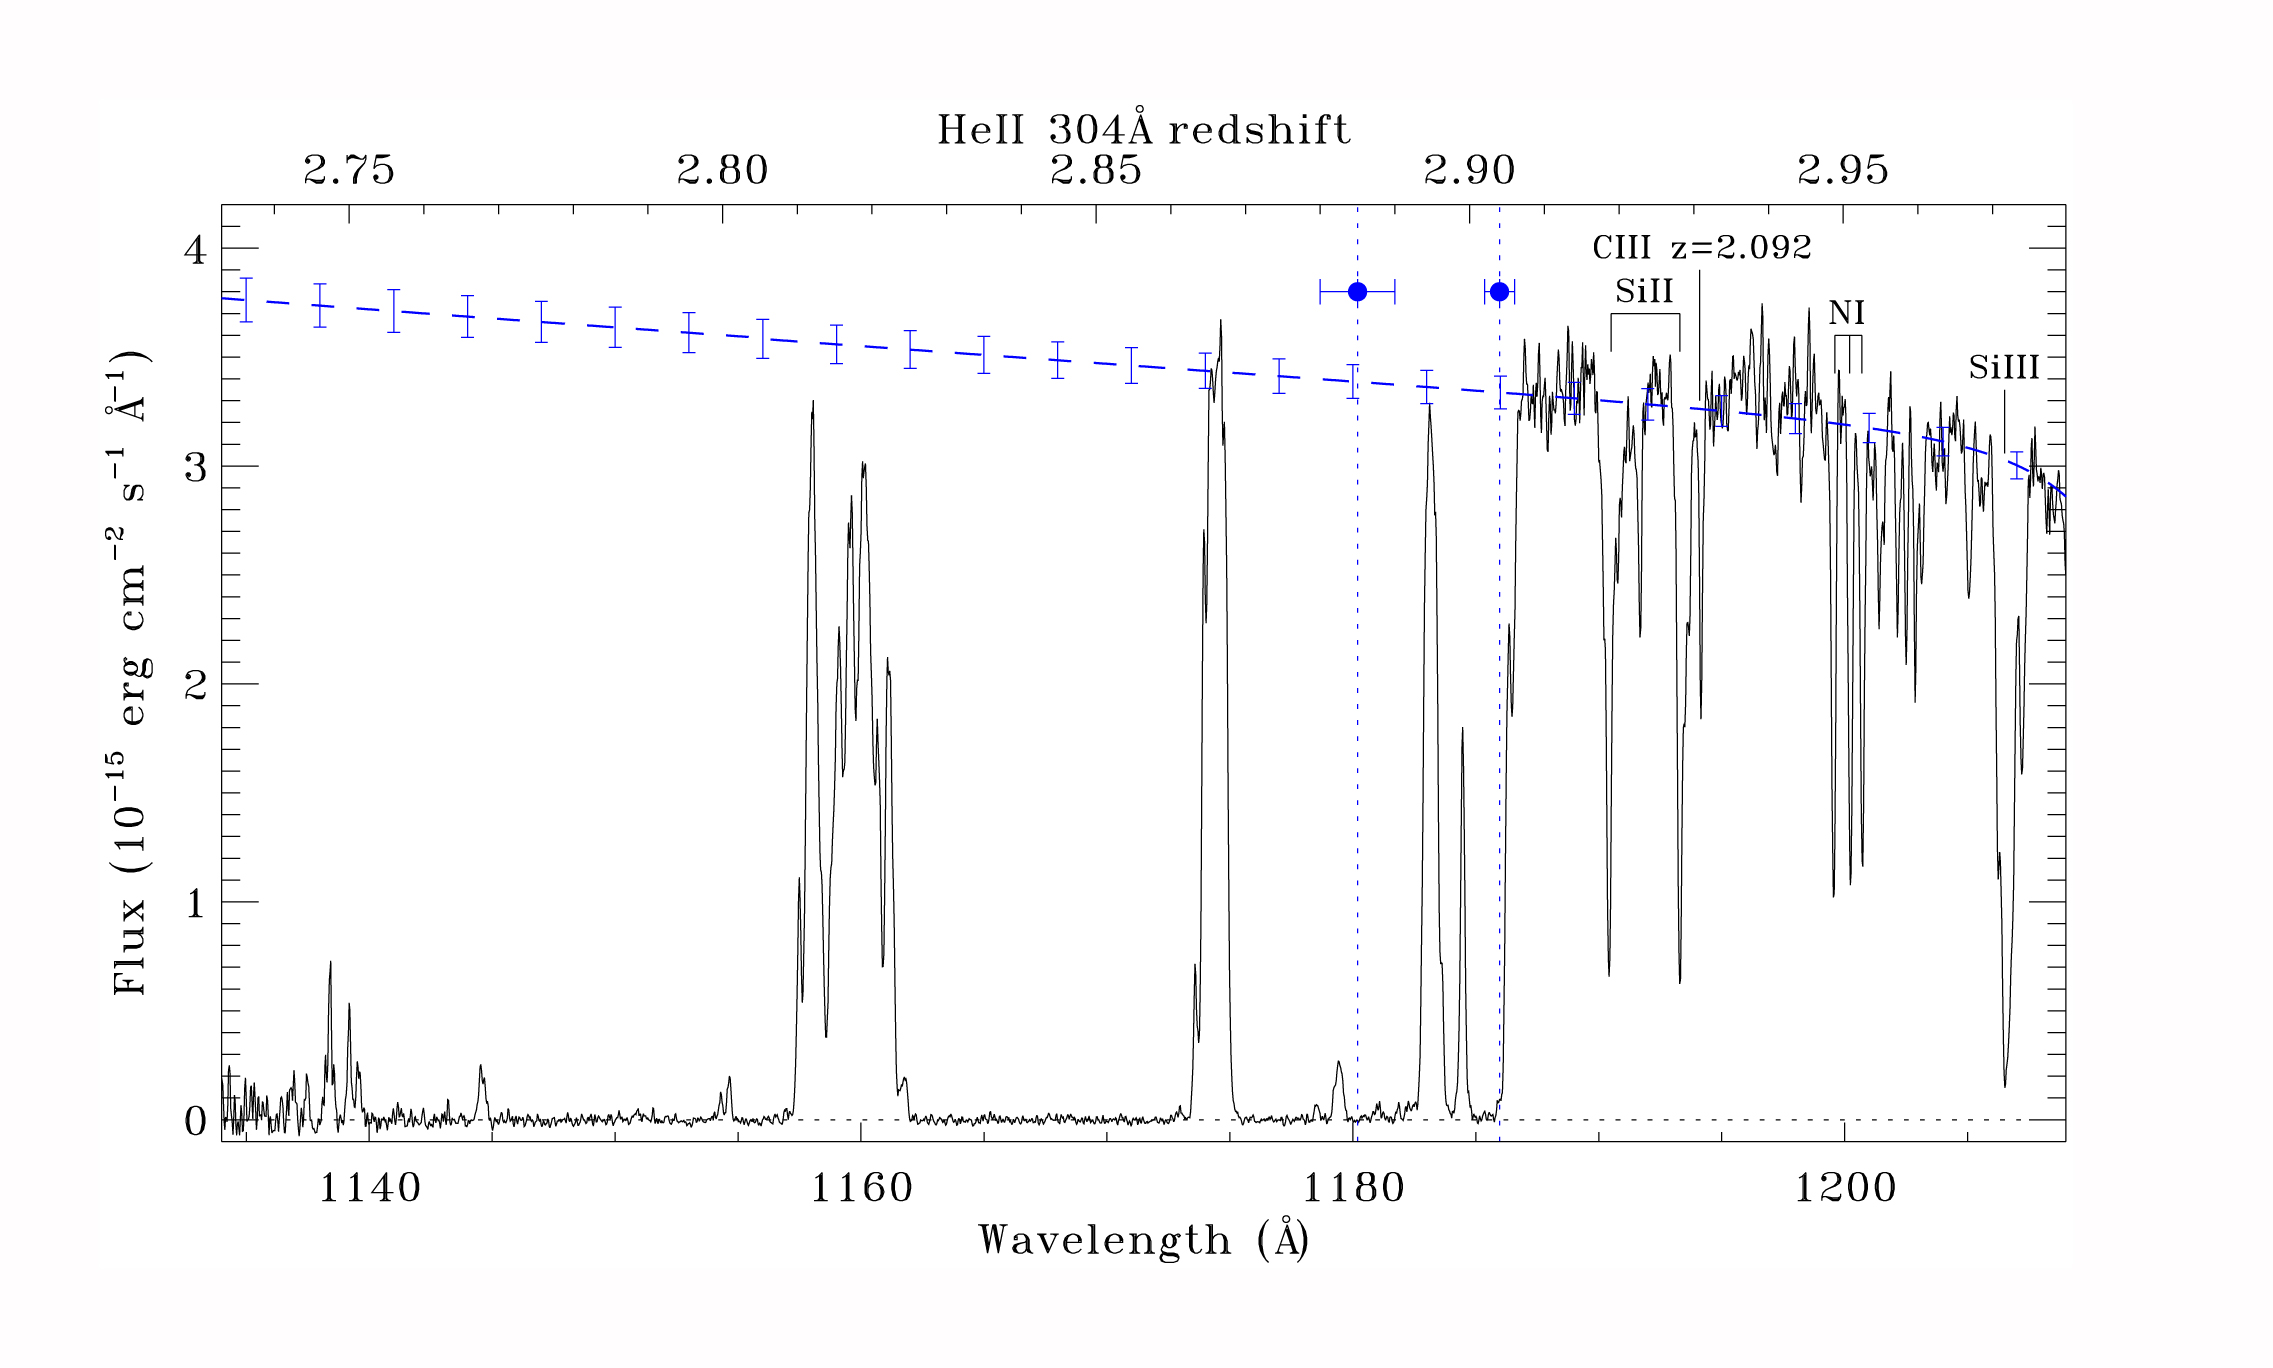

Helium reionisation in the early Universe

This ultraviolet-light data from the Hubble Space Telescope's Cosmic Origins Spectrograph shows strong helium II absorption and transmission lines from a quasar, identifying an era 11.7 to 11.3 billion years ago when electrons were stripped from primeval helium atoms — a process called reionisation.

Credit: Shull et al., ApJ, 722: 1312-1324, October 20, 2010